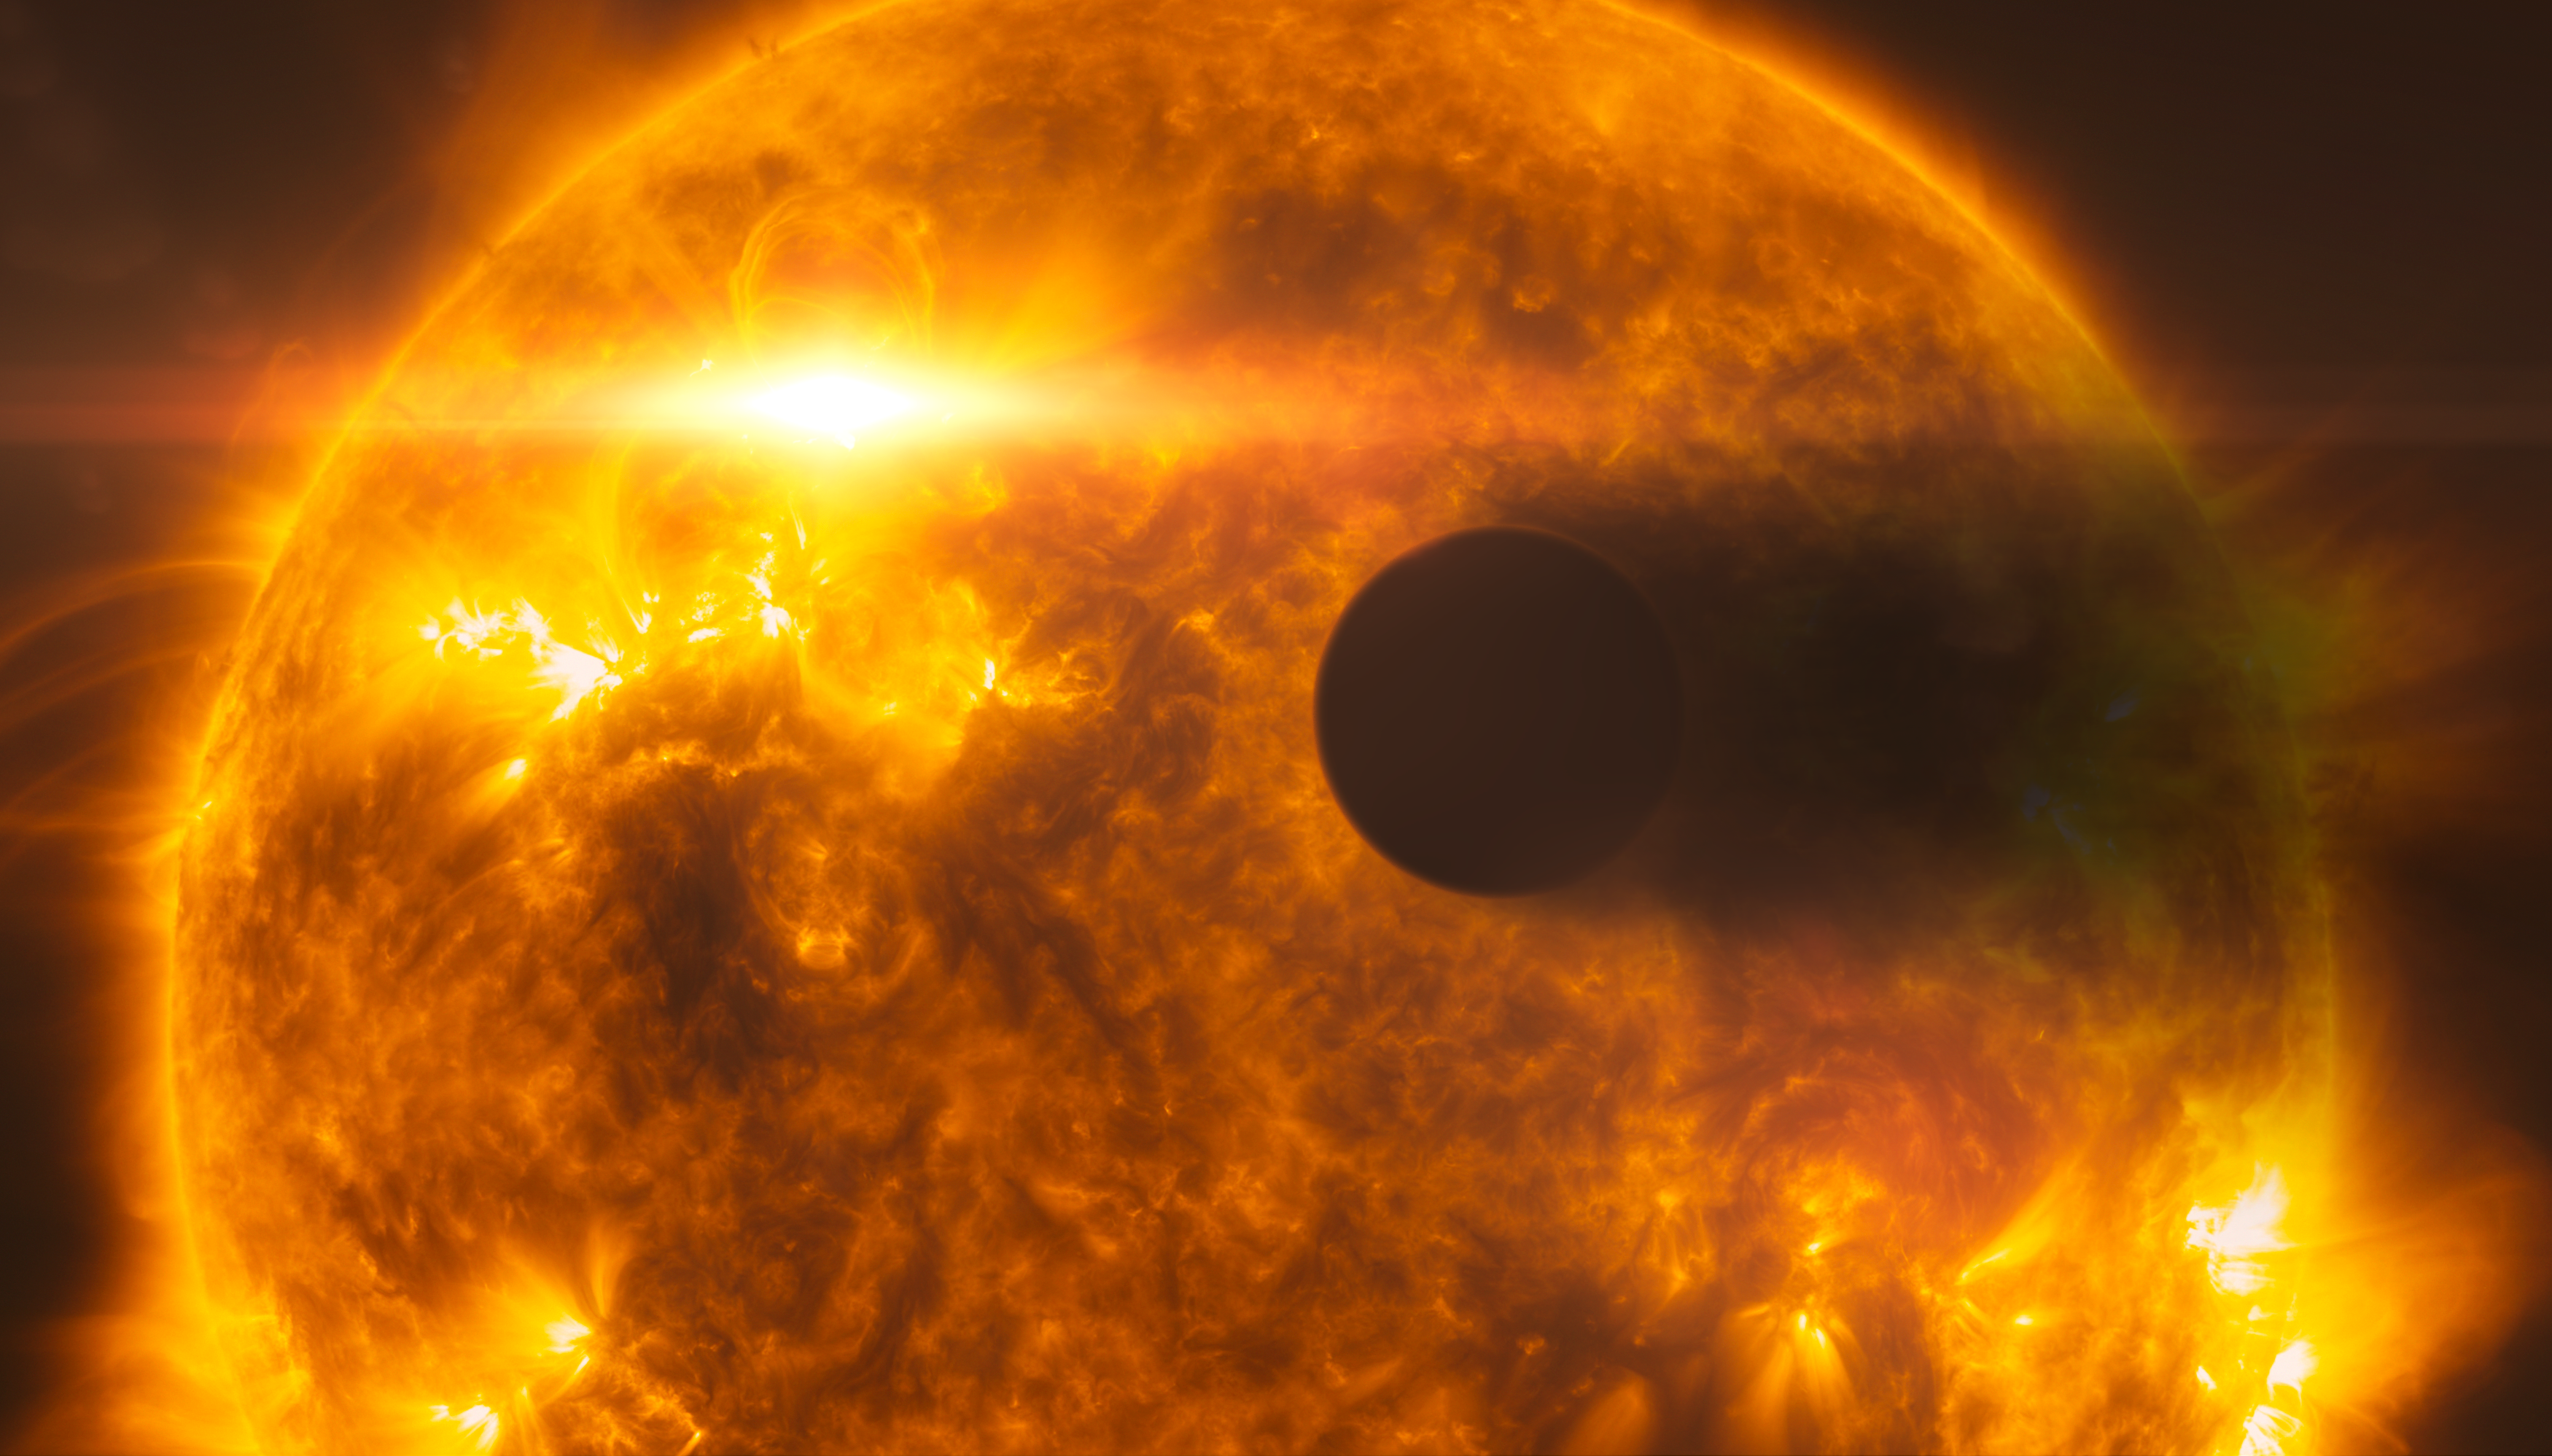

Stellar flare hits HD 189733b (artist's impression)

This artist’s impression shows exoplanet HD 189733b, as it passes in front of its parent star, called HD 189733A. Hubble’s instruments observed the system in 2010, and in 2011 following a large flare from the star (depicted in the image). Following the flare, Hubble observed the planet’s atmosphere evaporating at a rate of over 1000 tonnes per second.

In this picture, the surface of the star, which is around 80% the mass of the Sun, is based on observations of the Sun from the Solar Dynamics Observatory.

Credit: NASA, ESA, L. Calçada